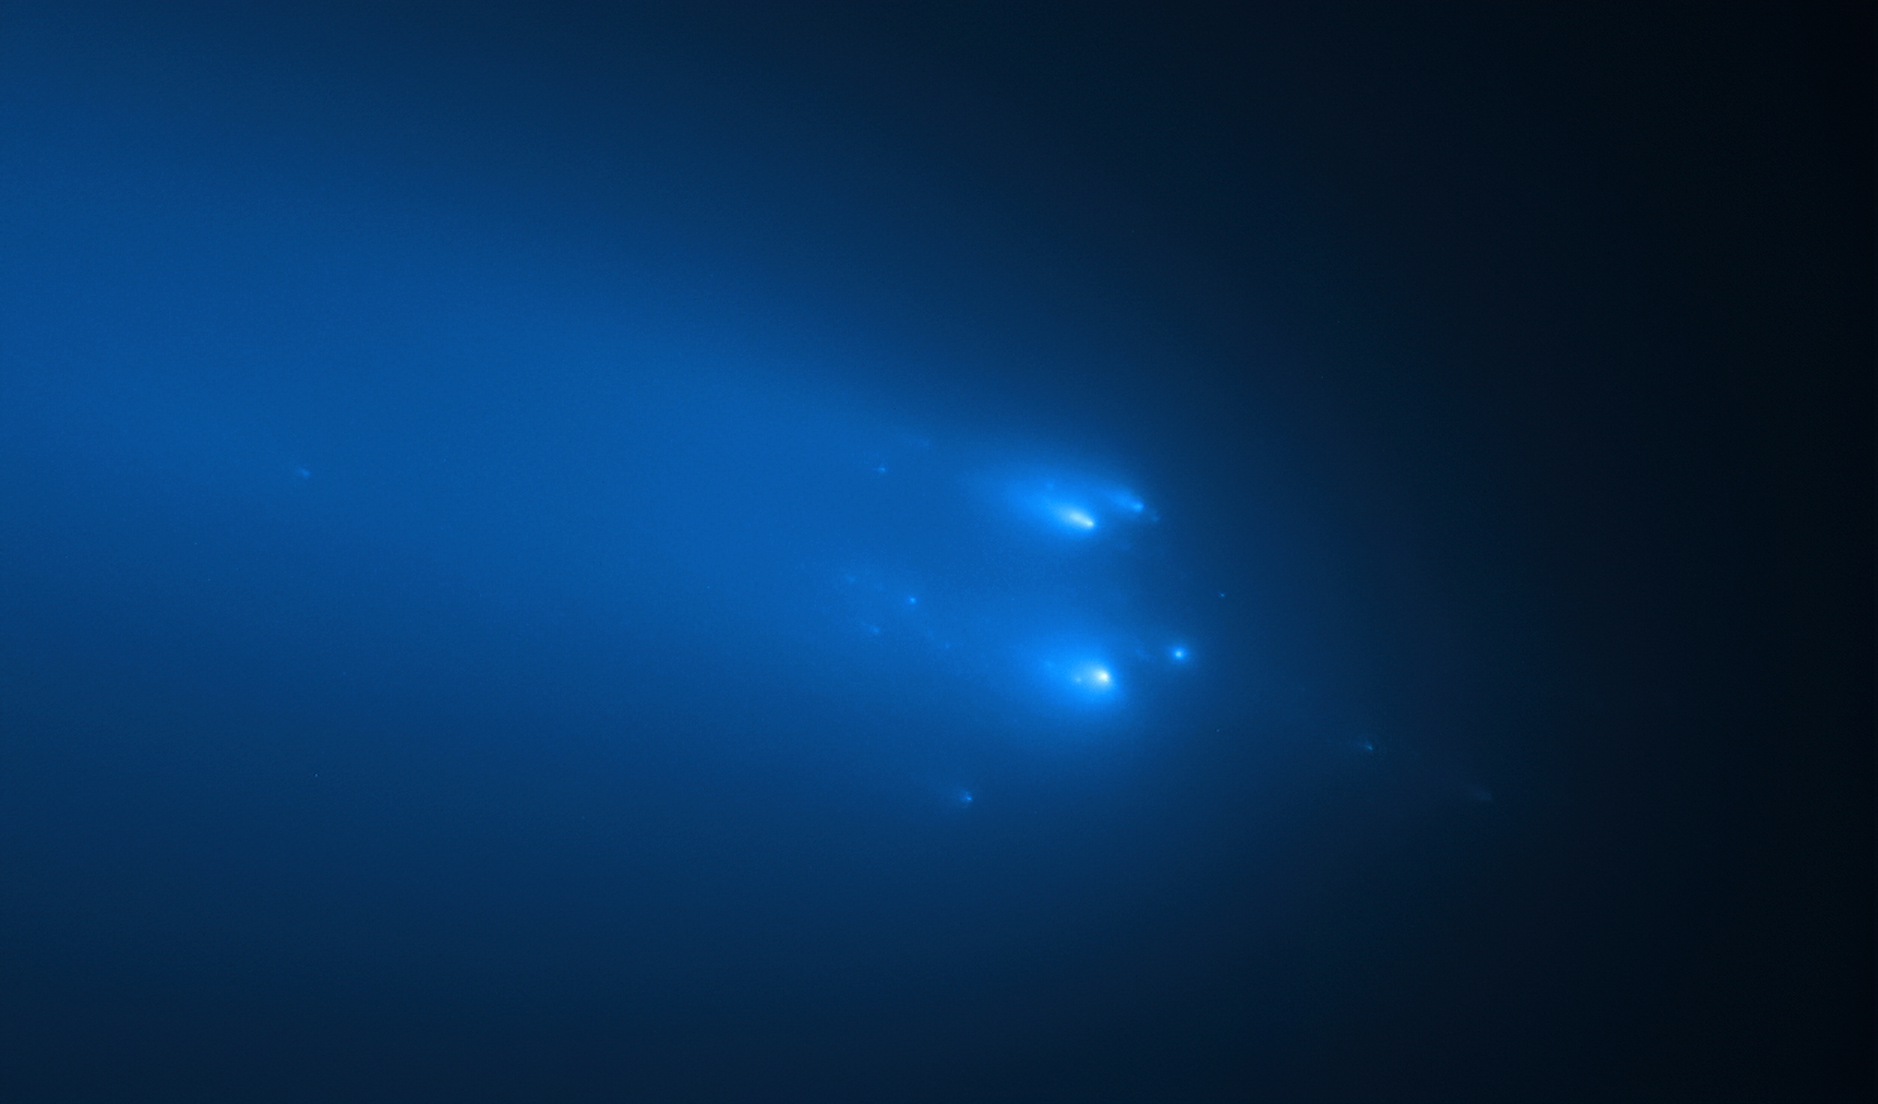

Hubble’s Observation of Comet C/2019 Y4 (ATLAS) on 20 April

The NASA/ESA Hubble Space Telescope has provided astronomers with the sharpest view yet of the breakup of Comet C/2019 Y4 (ATLAS). The telescope resolved roughly 30 fragments of the comet on 20 April.

The comet was first discovered in December 2019 by the ATLAS (Asteroid Terrestrial-impact Last Alert System) and its fragmentation was confirmed in April 2020.

Credit: NASA, ESA, D. Jewitt (UCLA), Q. Ye (University of Maryland)